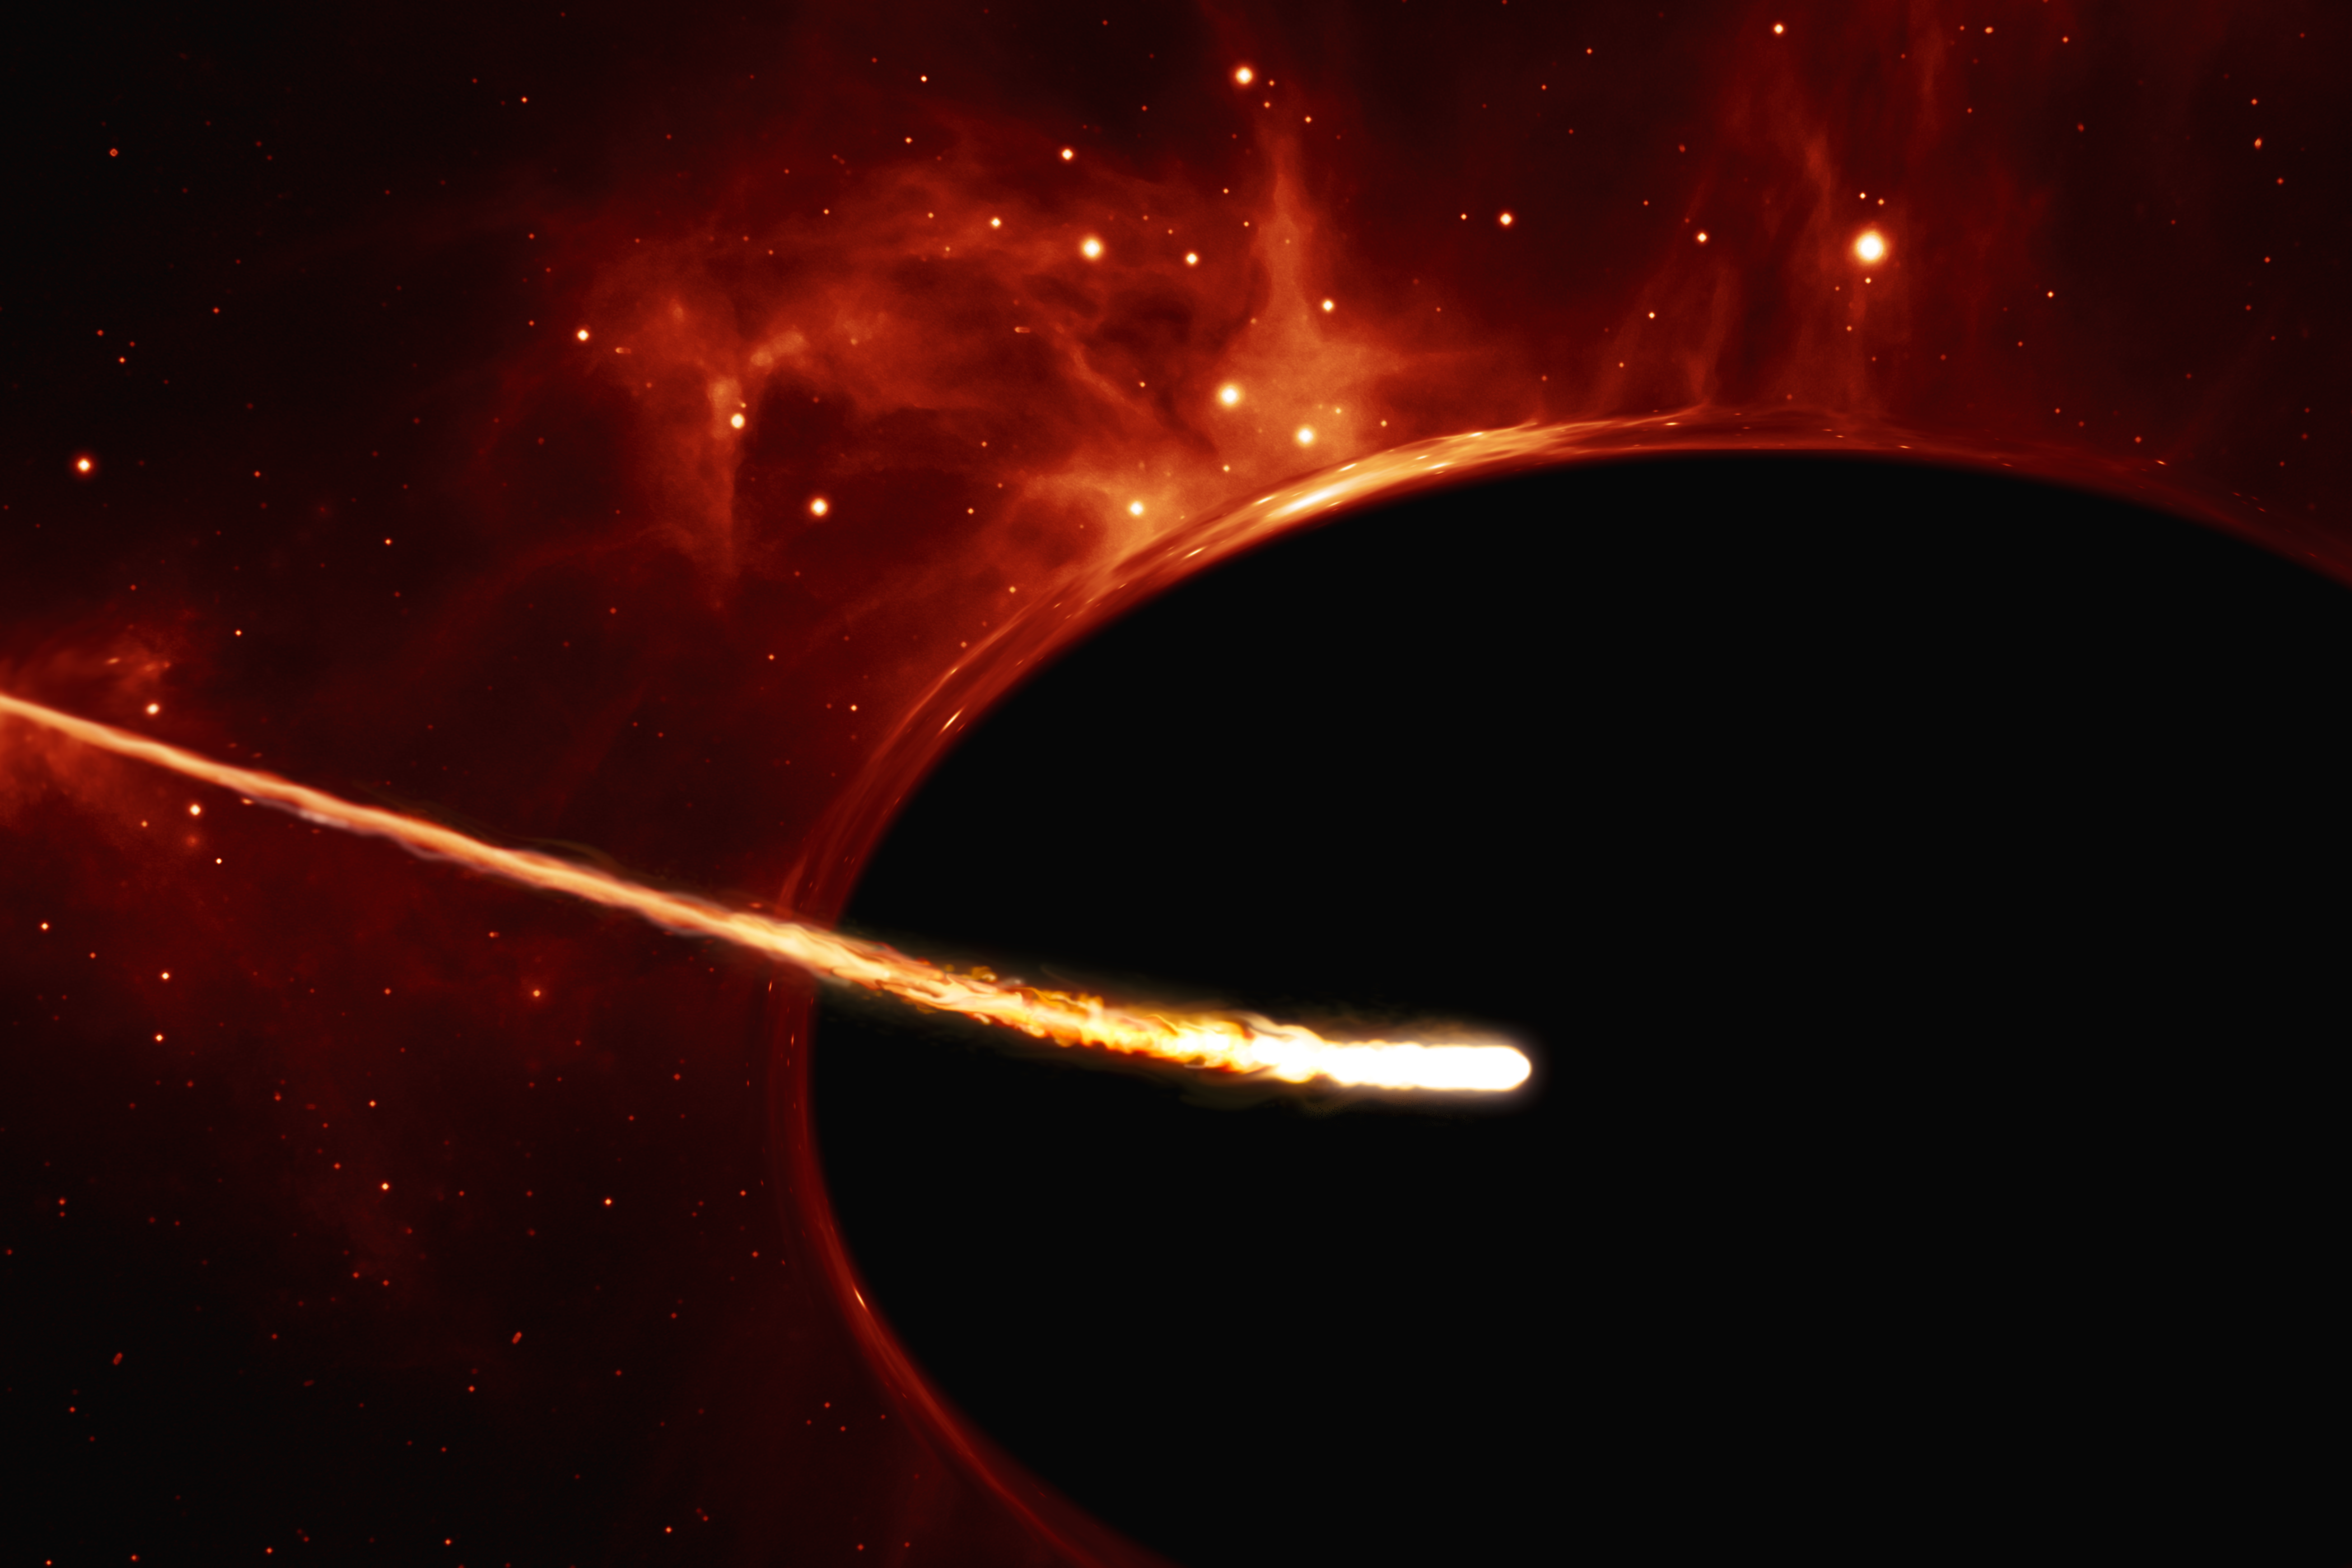

Close-up of star near a supermassive black hole (artist’s impression)

This artist’s impression depicts a Sun-like star close to a rapidly spinning supermassive black hole, with a mass of about 100 million times the mass of the Sun, in the centre of a distant galaxy. Its large mass bends the light from stars and gas behind it. Despite being way more massive than the star, the supermassive black hole has an event horizon which is only 200 times larger than the size of the star. Its fast rotation has changed its shape into an oblate sphere.

The gravitational pull of the supermassive black hole rips the the star apart in a tidal disruption event. In the process, the star was “spaghettified” and shocks in the colliding debris as well as heat generated in accretion led to a burst of light.

Credit: ESA/Hubble, ESO, M. Kornmesser